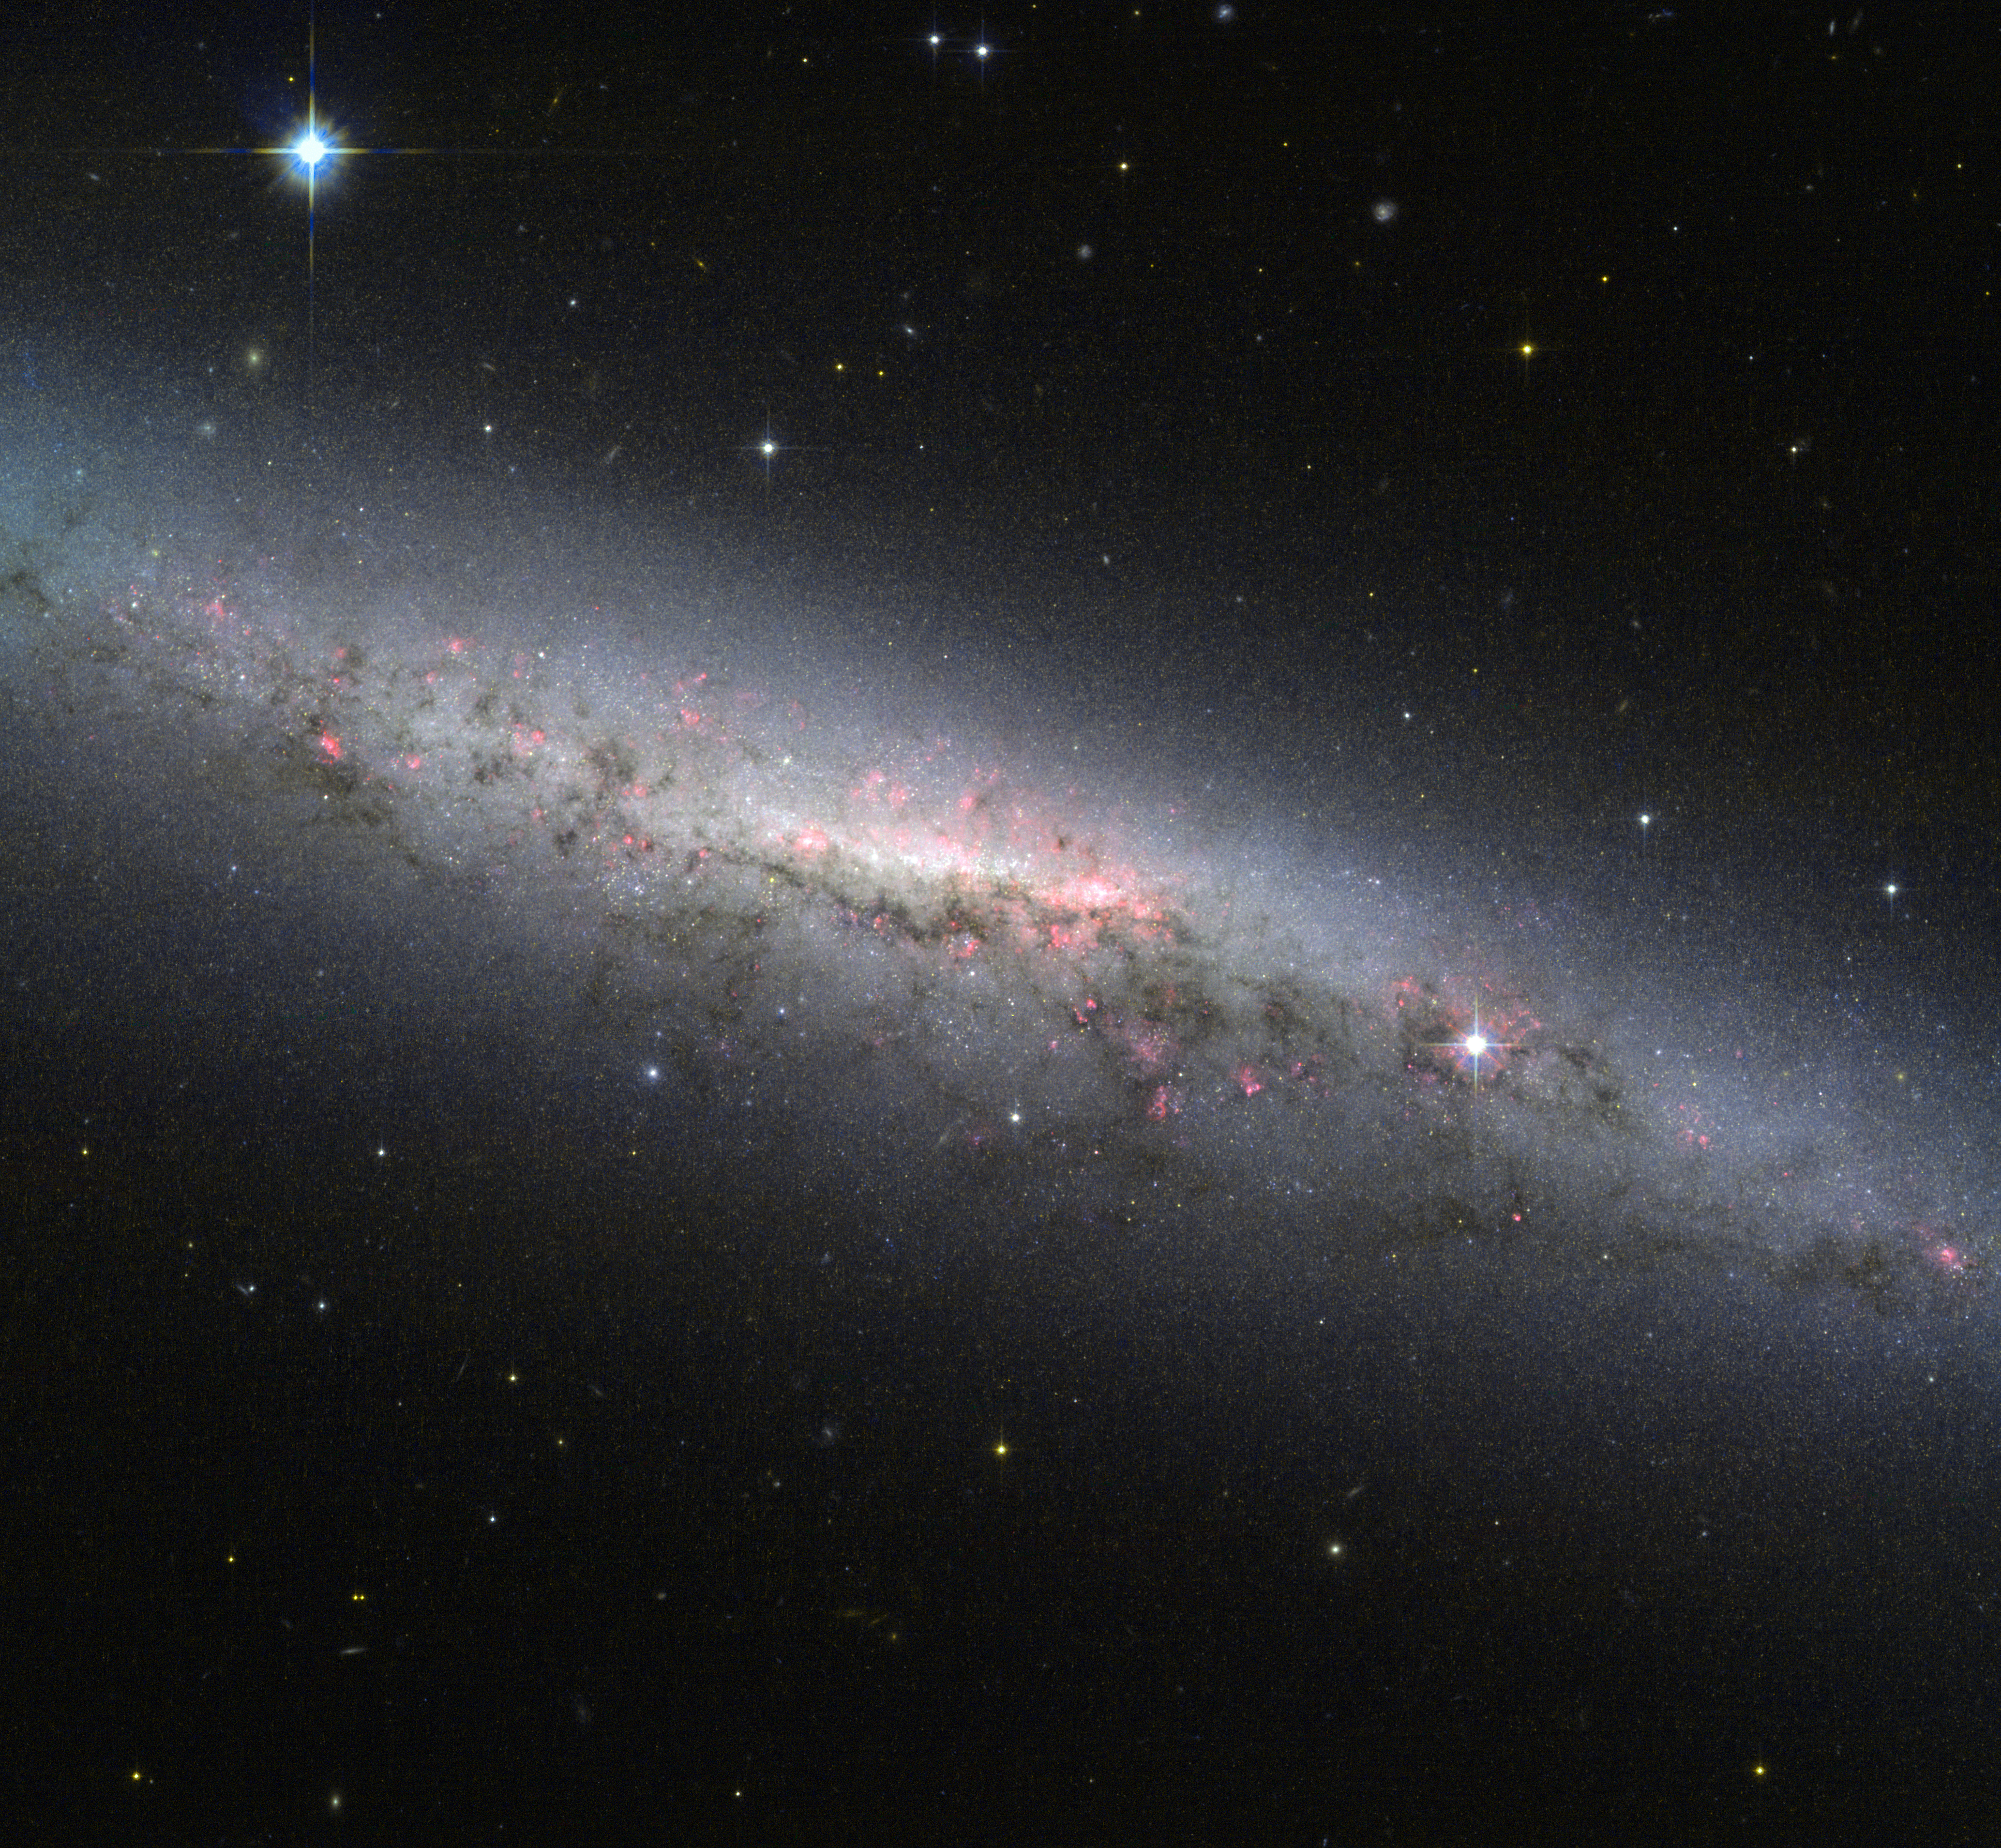

NGC 7090 — An actively star-forming galaxy

This image portrays a beautiful view of the galaxy NGC 7090, as seen by the NASA/ESA Hubble Space Telescope. The galaxy is viewed edge-on from the Earth, meaning we cannot easily see the spiral arms, which are full of young, hot stars.

However, our side-on view shows the galaxy’s disc and the bulging central core, where typically a large group of cool old stars are packed in a compact, spheroidal region. In addition, there are two interesting features present in the image that are worth mentioning.

First, we are able to distinguish an intricate pattern of pinkish red regions over the whole galaxy. This indicates the presence of clouds of hydrogen gas. These structures trace the location of ongoing star formation, visual confirmation of recent studies that classify NGC 7090 as an actively star-forming galaxy.

Second, we observe dust lanes, depicted as dark regions inside the disc of the galaxy. In NGC 7090, these regions are mostly located in lower half of the galaxy, showing an intricate filamentary structure. Looking from the outside in through the whole disc, the light emitted from the bright centre of the galaxy is absorbed by the dust, silhouetting the dusty regions against the bright light in the background.

Dust in our galaxy, the Milky Way, has been one of the worst enemies of observational astronomers for decades. But this does not mean that these regions are quite blind spots in the sky. At near-infrared wavelengths — slightly longer wavelengths than visible light — this dust is largely transparent and astronomers are able to study what is really behind it. At still longer wavelengths, the realm of radio astronomy, the dust itself can actually be observed, letting astronomers study the structure and properties of dust clouds and their relationship with star formation.

Lying in the southern constellation of Indus (The Indian), NGC 7090 is located about thirty million light-years from the Sun. Astronomer John Herschel first observed this galaxy on 4 October, 1834.

The image was taken using the Wide Field Channel of the Advanced Camera for Surveys aboard the Hubble Space Telescope and combines orange light (coloured blue here), infrared (coloured red) and emissions from glowing hydrogen gas (also in red).

A version of this image of NGC 7090 was entered into the Hubble’s Hidden Treasures Image Processing Competition by contestant Rasid Tugral. Hidden Treasures is an initiative to invite astronomy enthusiasts to search the Hubble archive for stunning images that have never been seen by the general public. The competition is now closed and the list of winners is available here.

Credit: ESA/Hubble & NASA Acknowledgement: R. Tugral